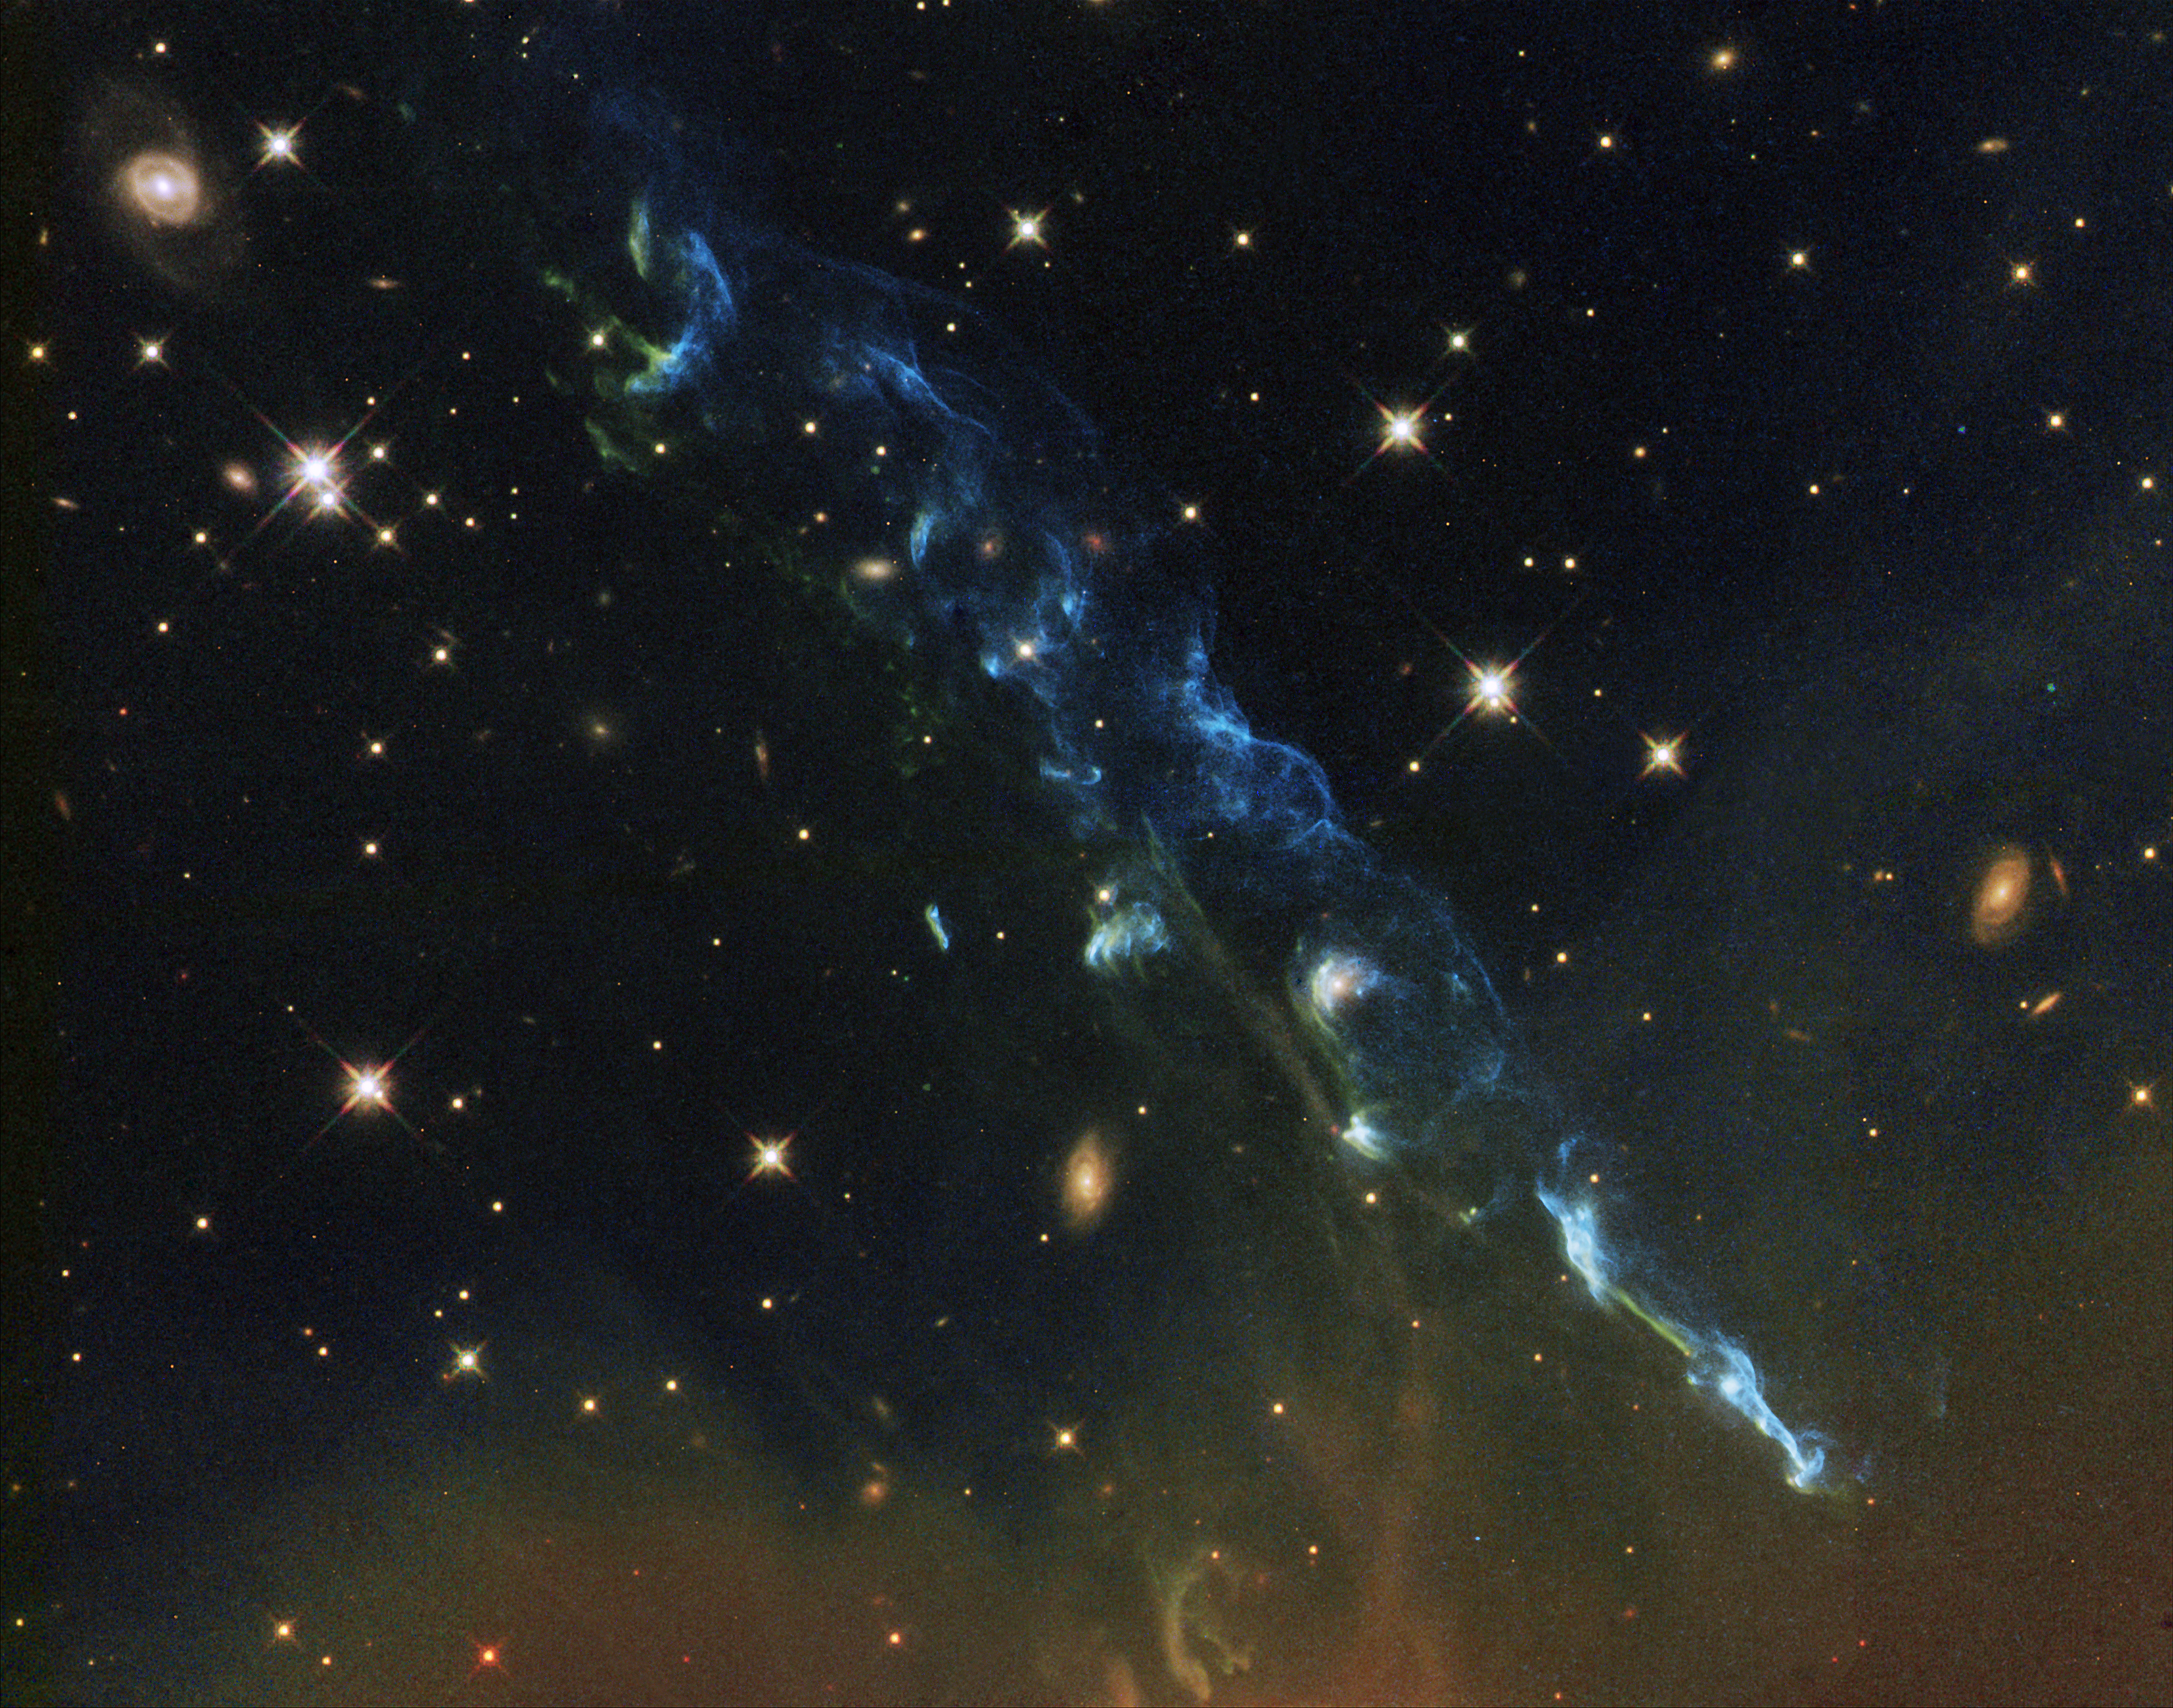

Hubble image of Herbig-Haro object HH 110

The NASA/ESA Hubble Space Telescope has captured a new image of Herbig-Haro 110, a geyser of hot gas flowing from a newborn star. HH 110 appears different from most other Herbig-Haro objects: in particular, it appears on its own while they usually come in pairs. Astronomers think it may be a continuation of another object called HH 270, after it has been deflected off a dense cloud of gas.

Credit: NASA, ESA and the Hubble Heritage team (STScI/AURA)